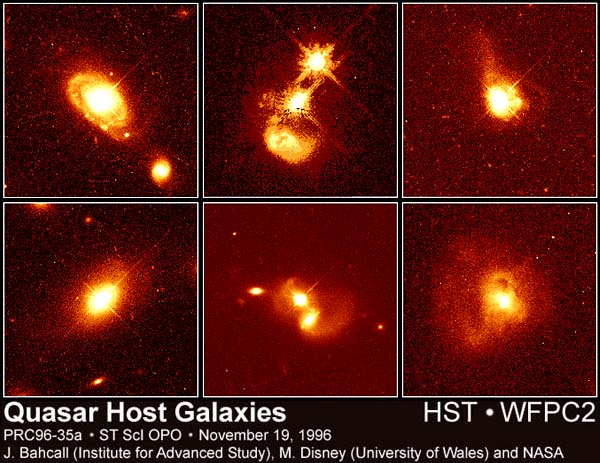

Quasars and Their Host Galaxies

Quasars reside in a variety of galaxies, from normal to highly disturbed. When seen through ground-based telescopes, these compact, enigmatic light sources resemble stars, yet they are billions of light-years away and several hundred billion times brighter than normal stars.

Credit: John Bahcall (Institute for Advanced Study, Princeton) Mike Disney (University of Wales) and NASA/ESA